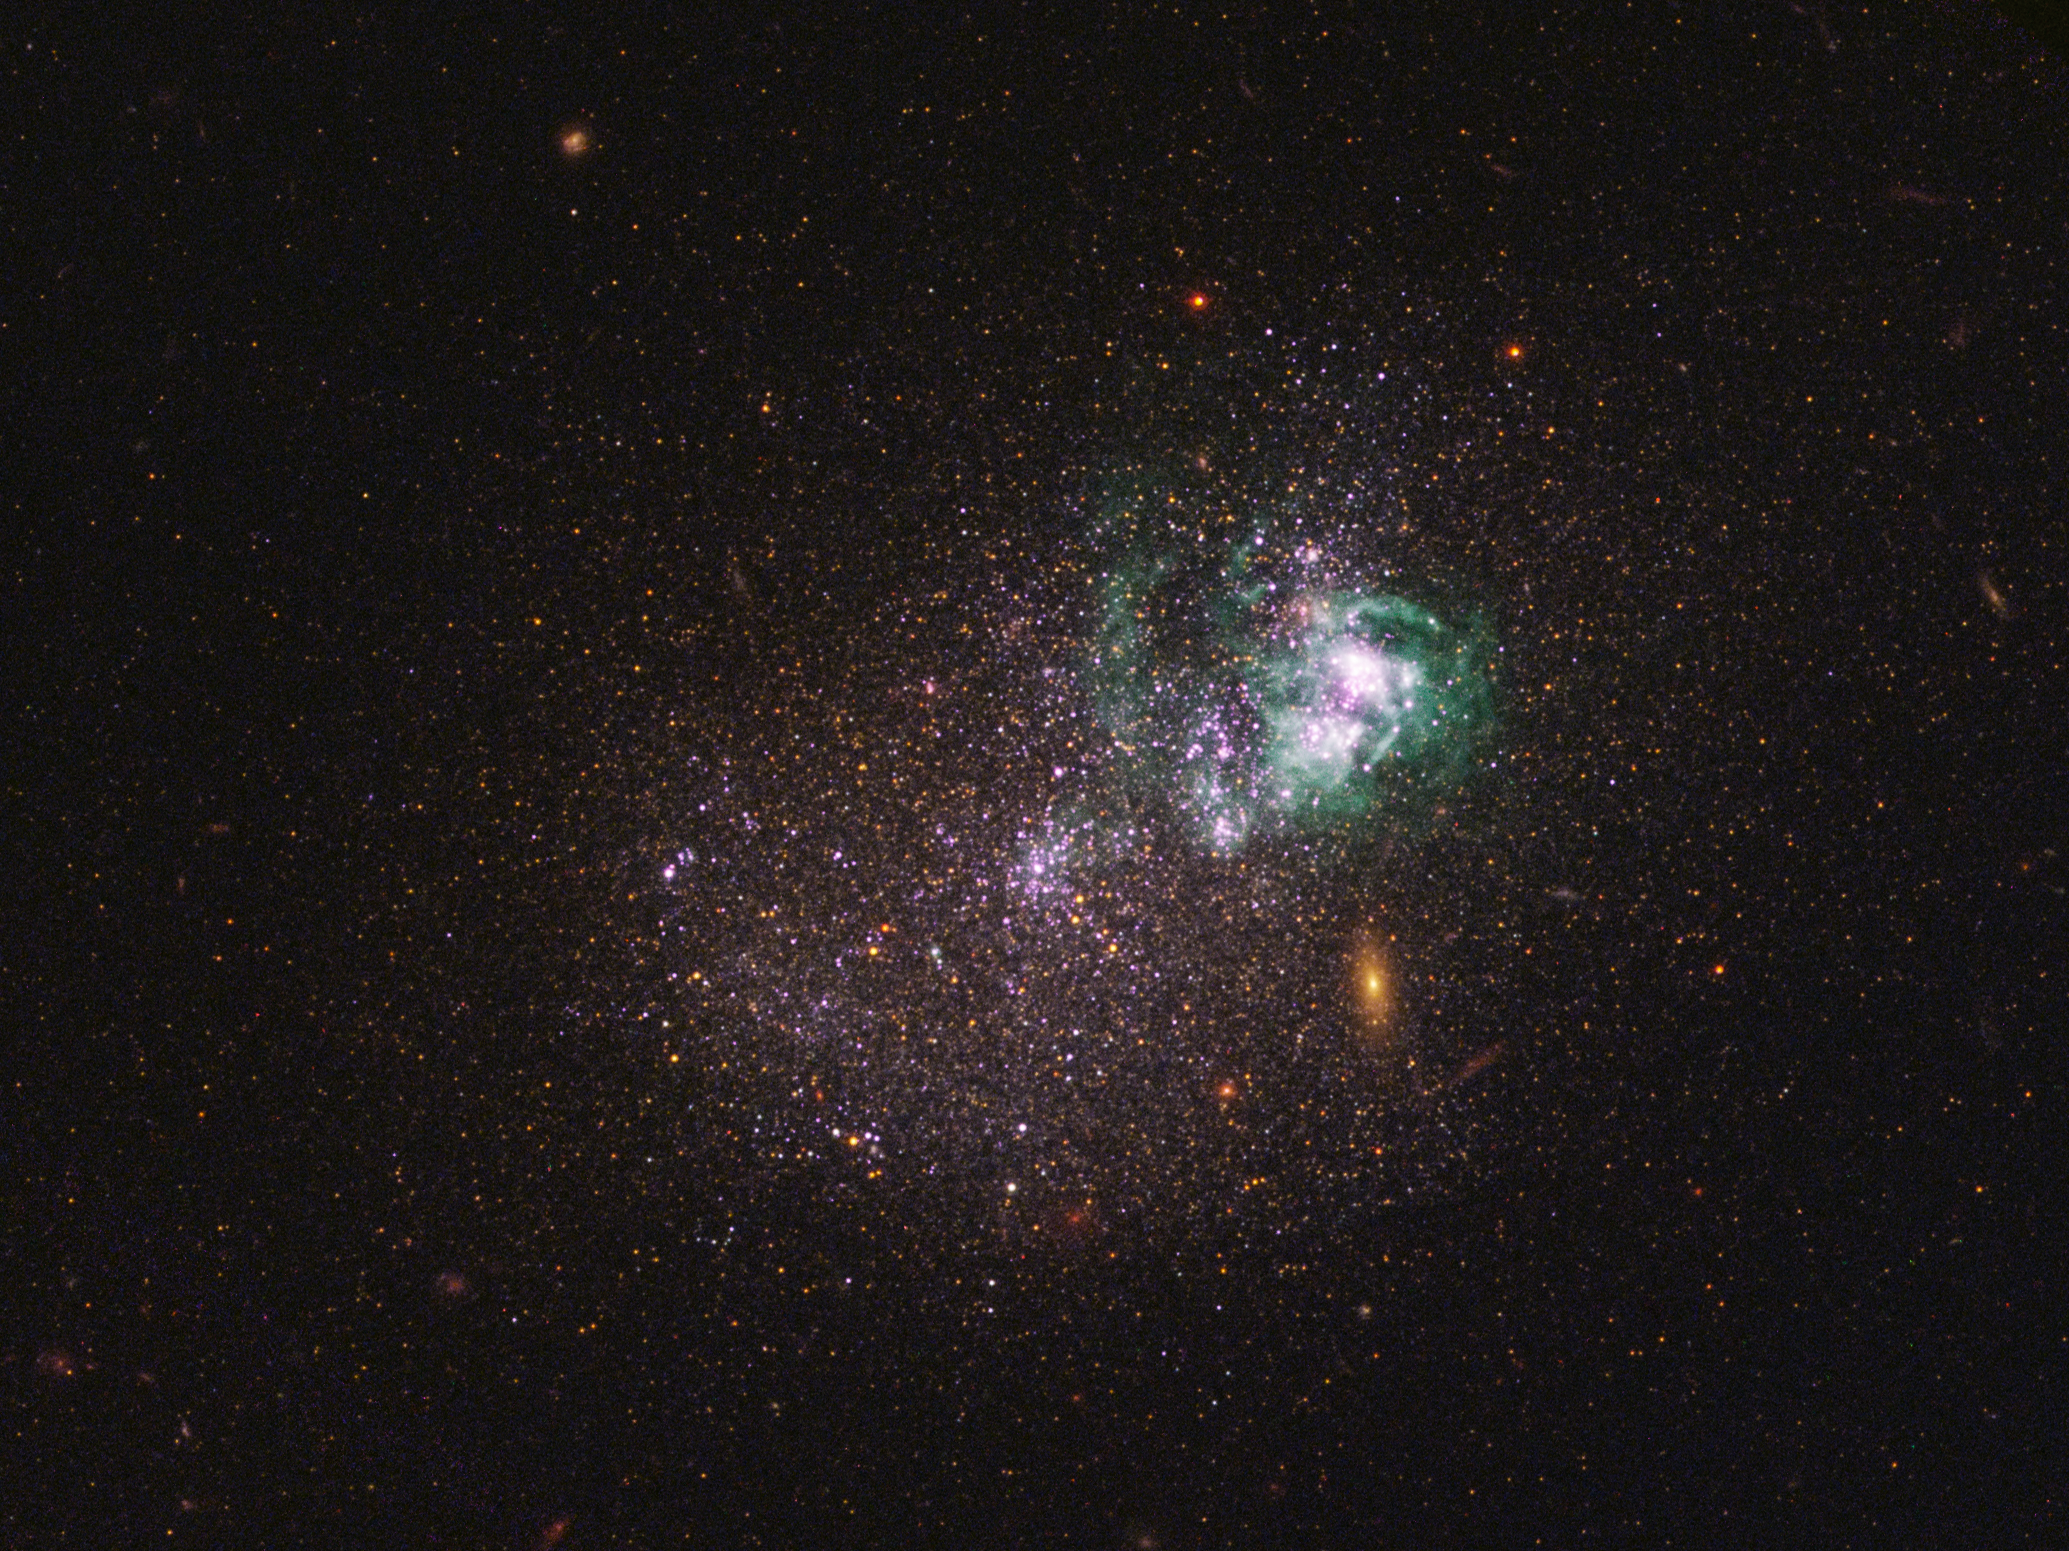

Dwarf galaxy UGCA 281

UGCA 281 is a blue compact dwarf galaxy located in the constellation of Canes Venatici. Within it, two giant star clusters appear brilliant white and are swaddled by greenish hydrogen gas clouds. These clusters are responsible for most of the recent star formation in UGCA 281; the rest of the galaxy is comprised of older stars and appears redder in colour. The reddish objects in the background are background galaxies that appear through the diffuse dwarf galaxy.

The image is a composite using both ultraviolet light and visible light, gathered with Hubble’s Wide Field Camera 3 and Advanced Camera for Surveys.

Credit: NASA, ESA, and the LEGUS team